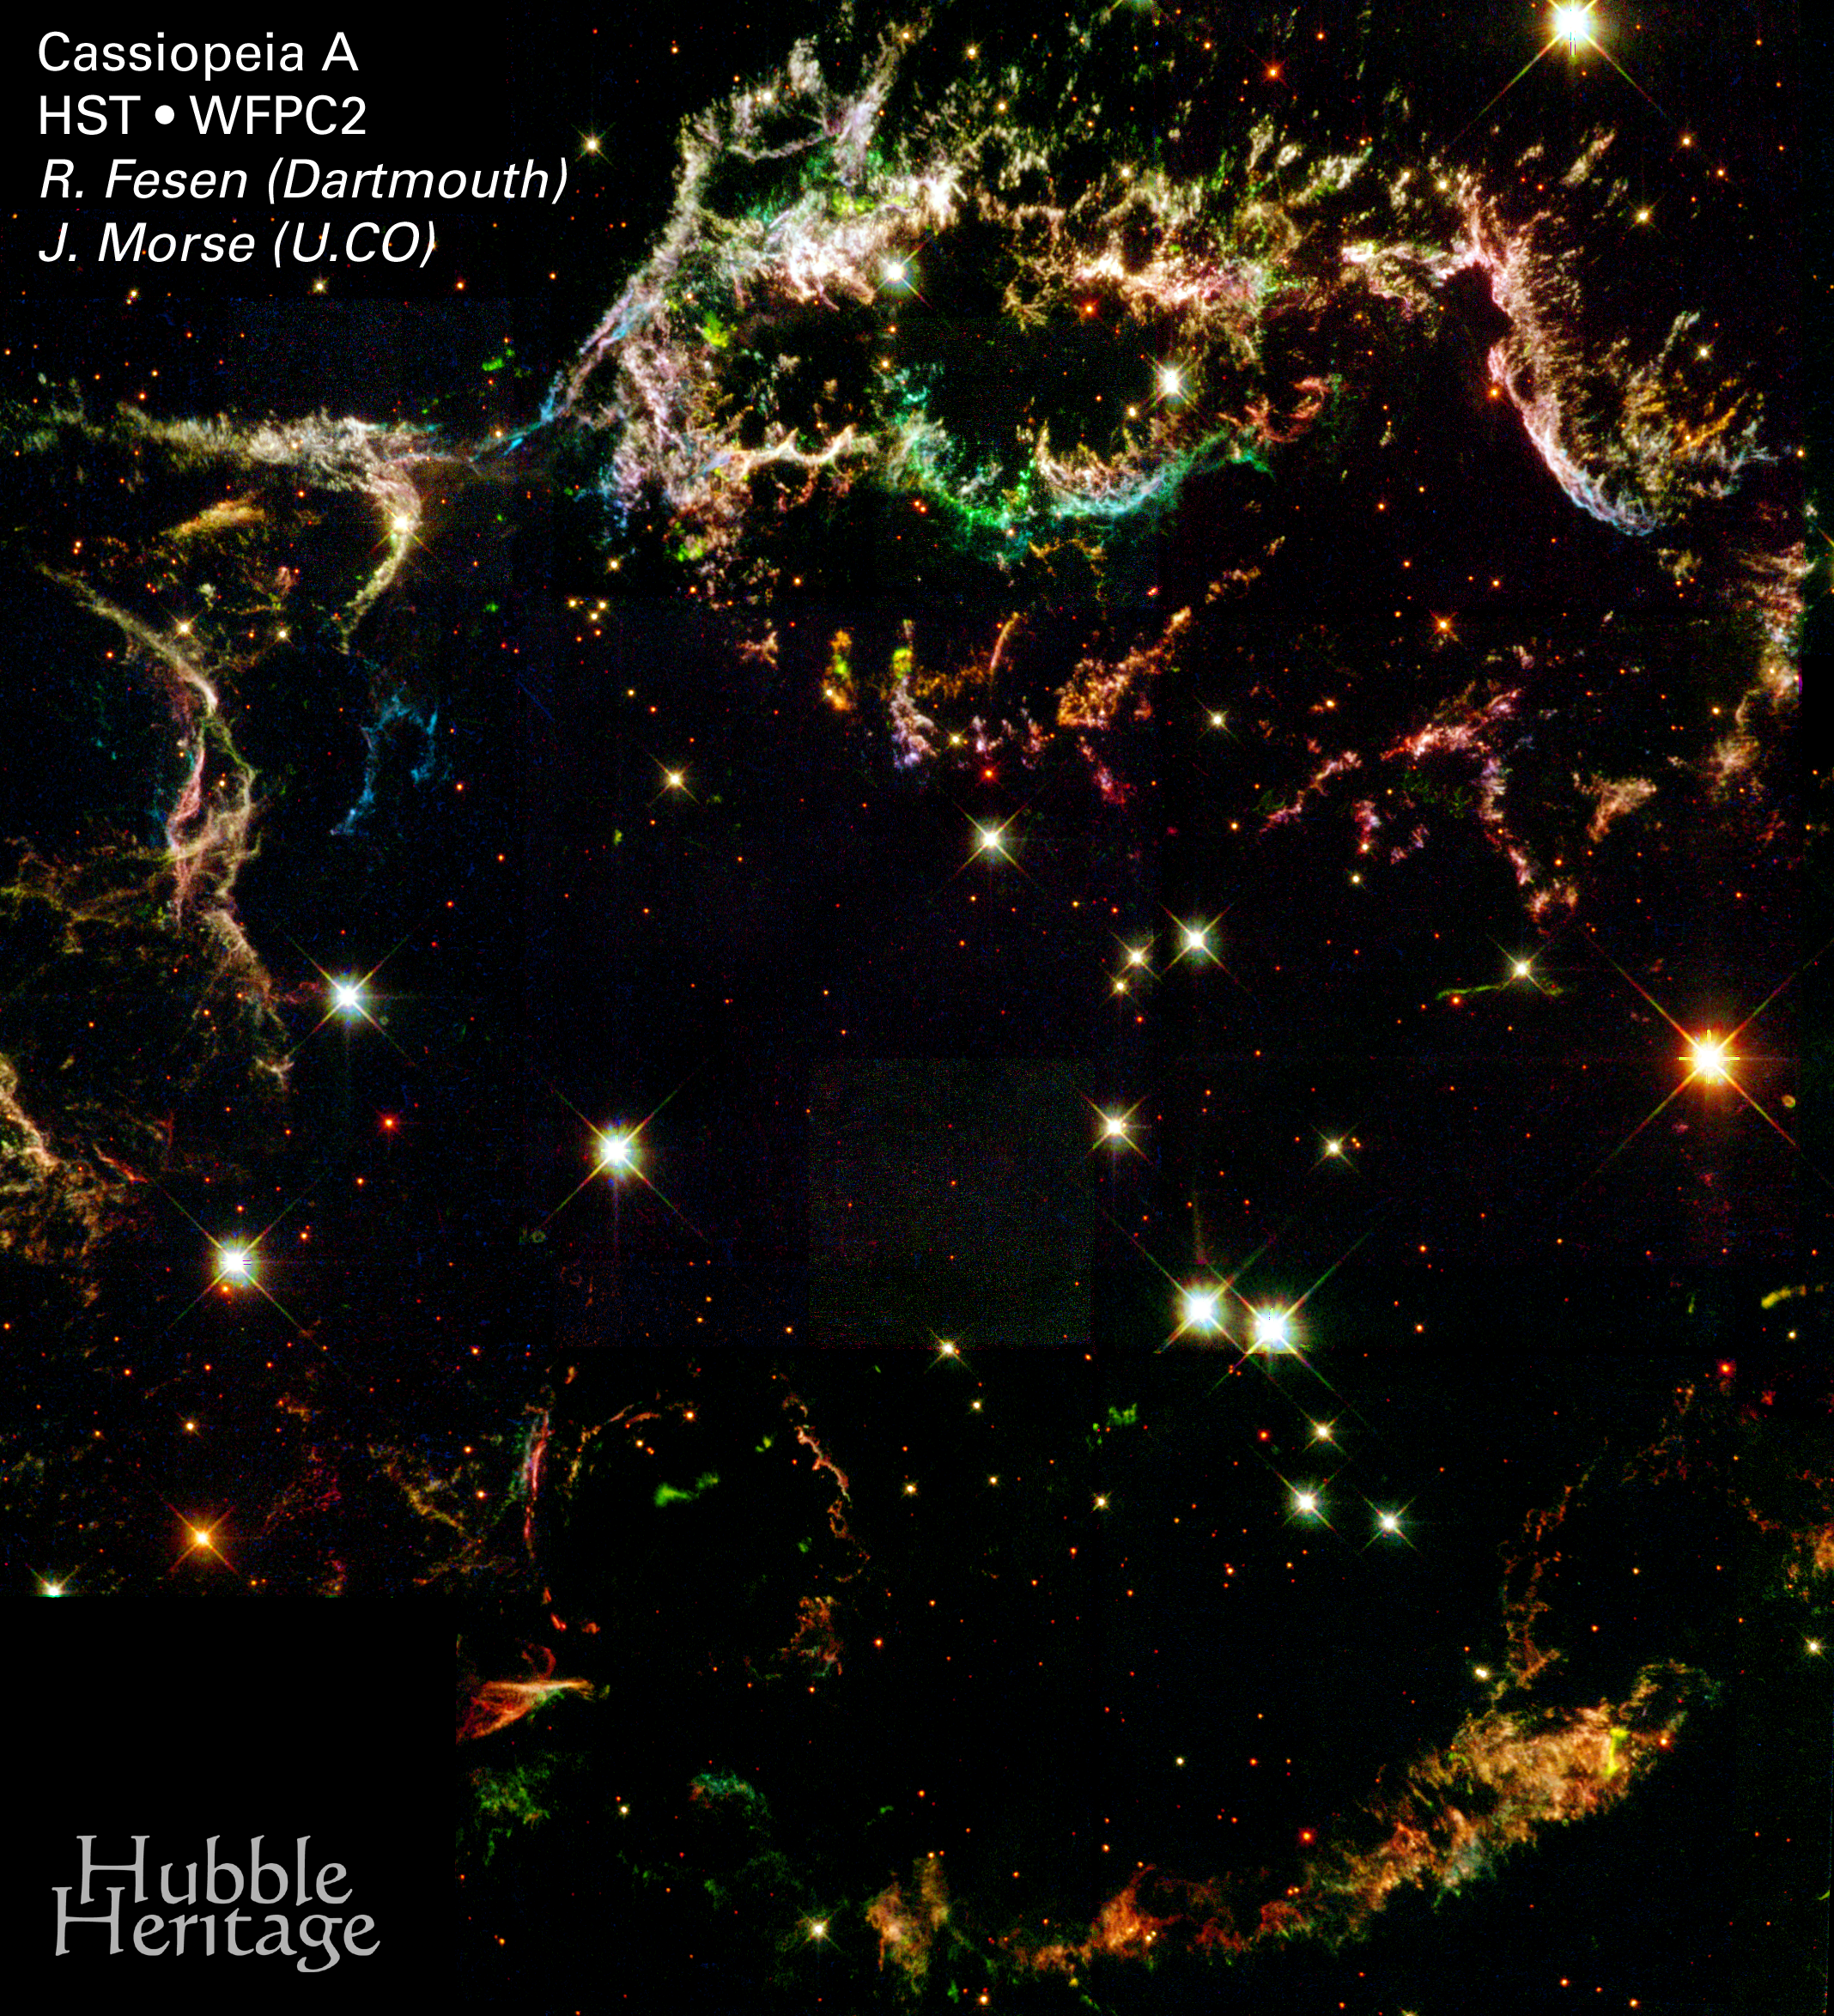

Full Image: Mosaic of WFPC2 Pointings

Glowing gaseous streamers of red, white, and blue - as well as green and pink - illuminate the heavens like Fourth of July fireworks. The colorful streamers that float across the sky in this photo taken by the NASA/ESA Hubble Space Telescope were created by the universe's biggest firecracker, the titanic supernova explosion of a massive star.

The light from the exploding star reached Earth 320 years ago. The dead star's shredded remains are called Cassiopeia A, or 'Cas A' for short. Cas A is the youngest known supernova remnant in our Milky Way Galaxy and resides 10, 000 light-years away in the constellation Cassiopeia, so the star actually blew up 10, 000 years before the light reached Earth in the late 1600s.

Credit: NASA/ESA and the Hubble Heritage Team (STScI/AURA)